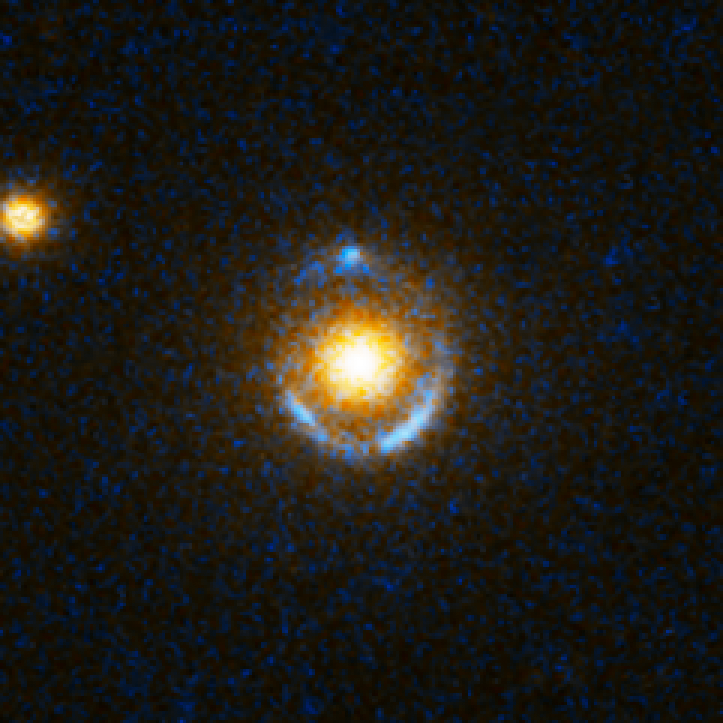

Einstein Ring Gravitational Lens: SDSS J073728.45+321618.5

The thin blue bull's-eye patterns in these eight Hubble Space Telescope images appear like neon signs floating over reddish-white blobs. The blobs are giant elliptical galaxies roughly 2 to 4 billion light-years away. The bull's-eye patterns are created as the light from galaxies twice as far away is distorted into circular shapes by the gravity of the giant elliptical galaxies. This phenomenon is called gravitational lensing, first predicted by Albert Einstein almost a century ago. Gravitational lensing occurs when the gravitational field from a massive object warps space and deflects light from a distant object behind it.

Credit: NASA, ESA, A. Bolton (Harvard-Smithsonian CfA) and the SLACS Team